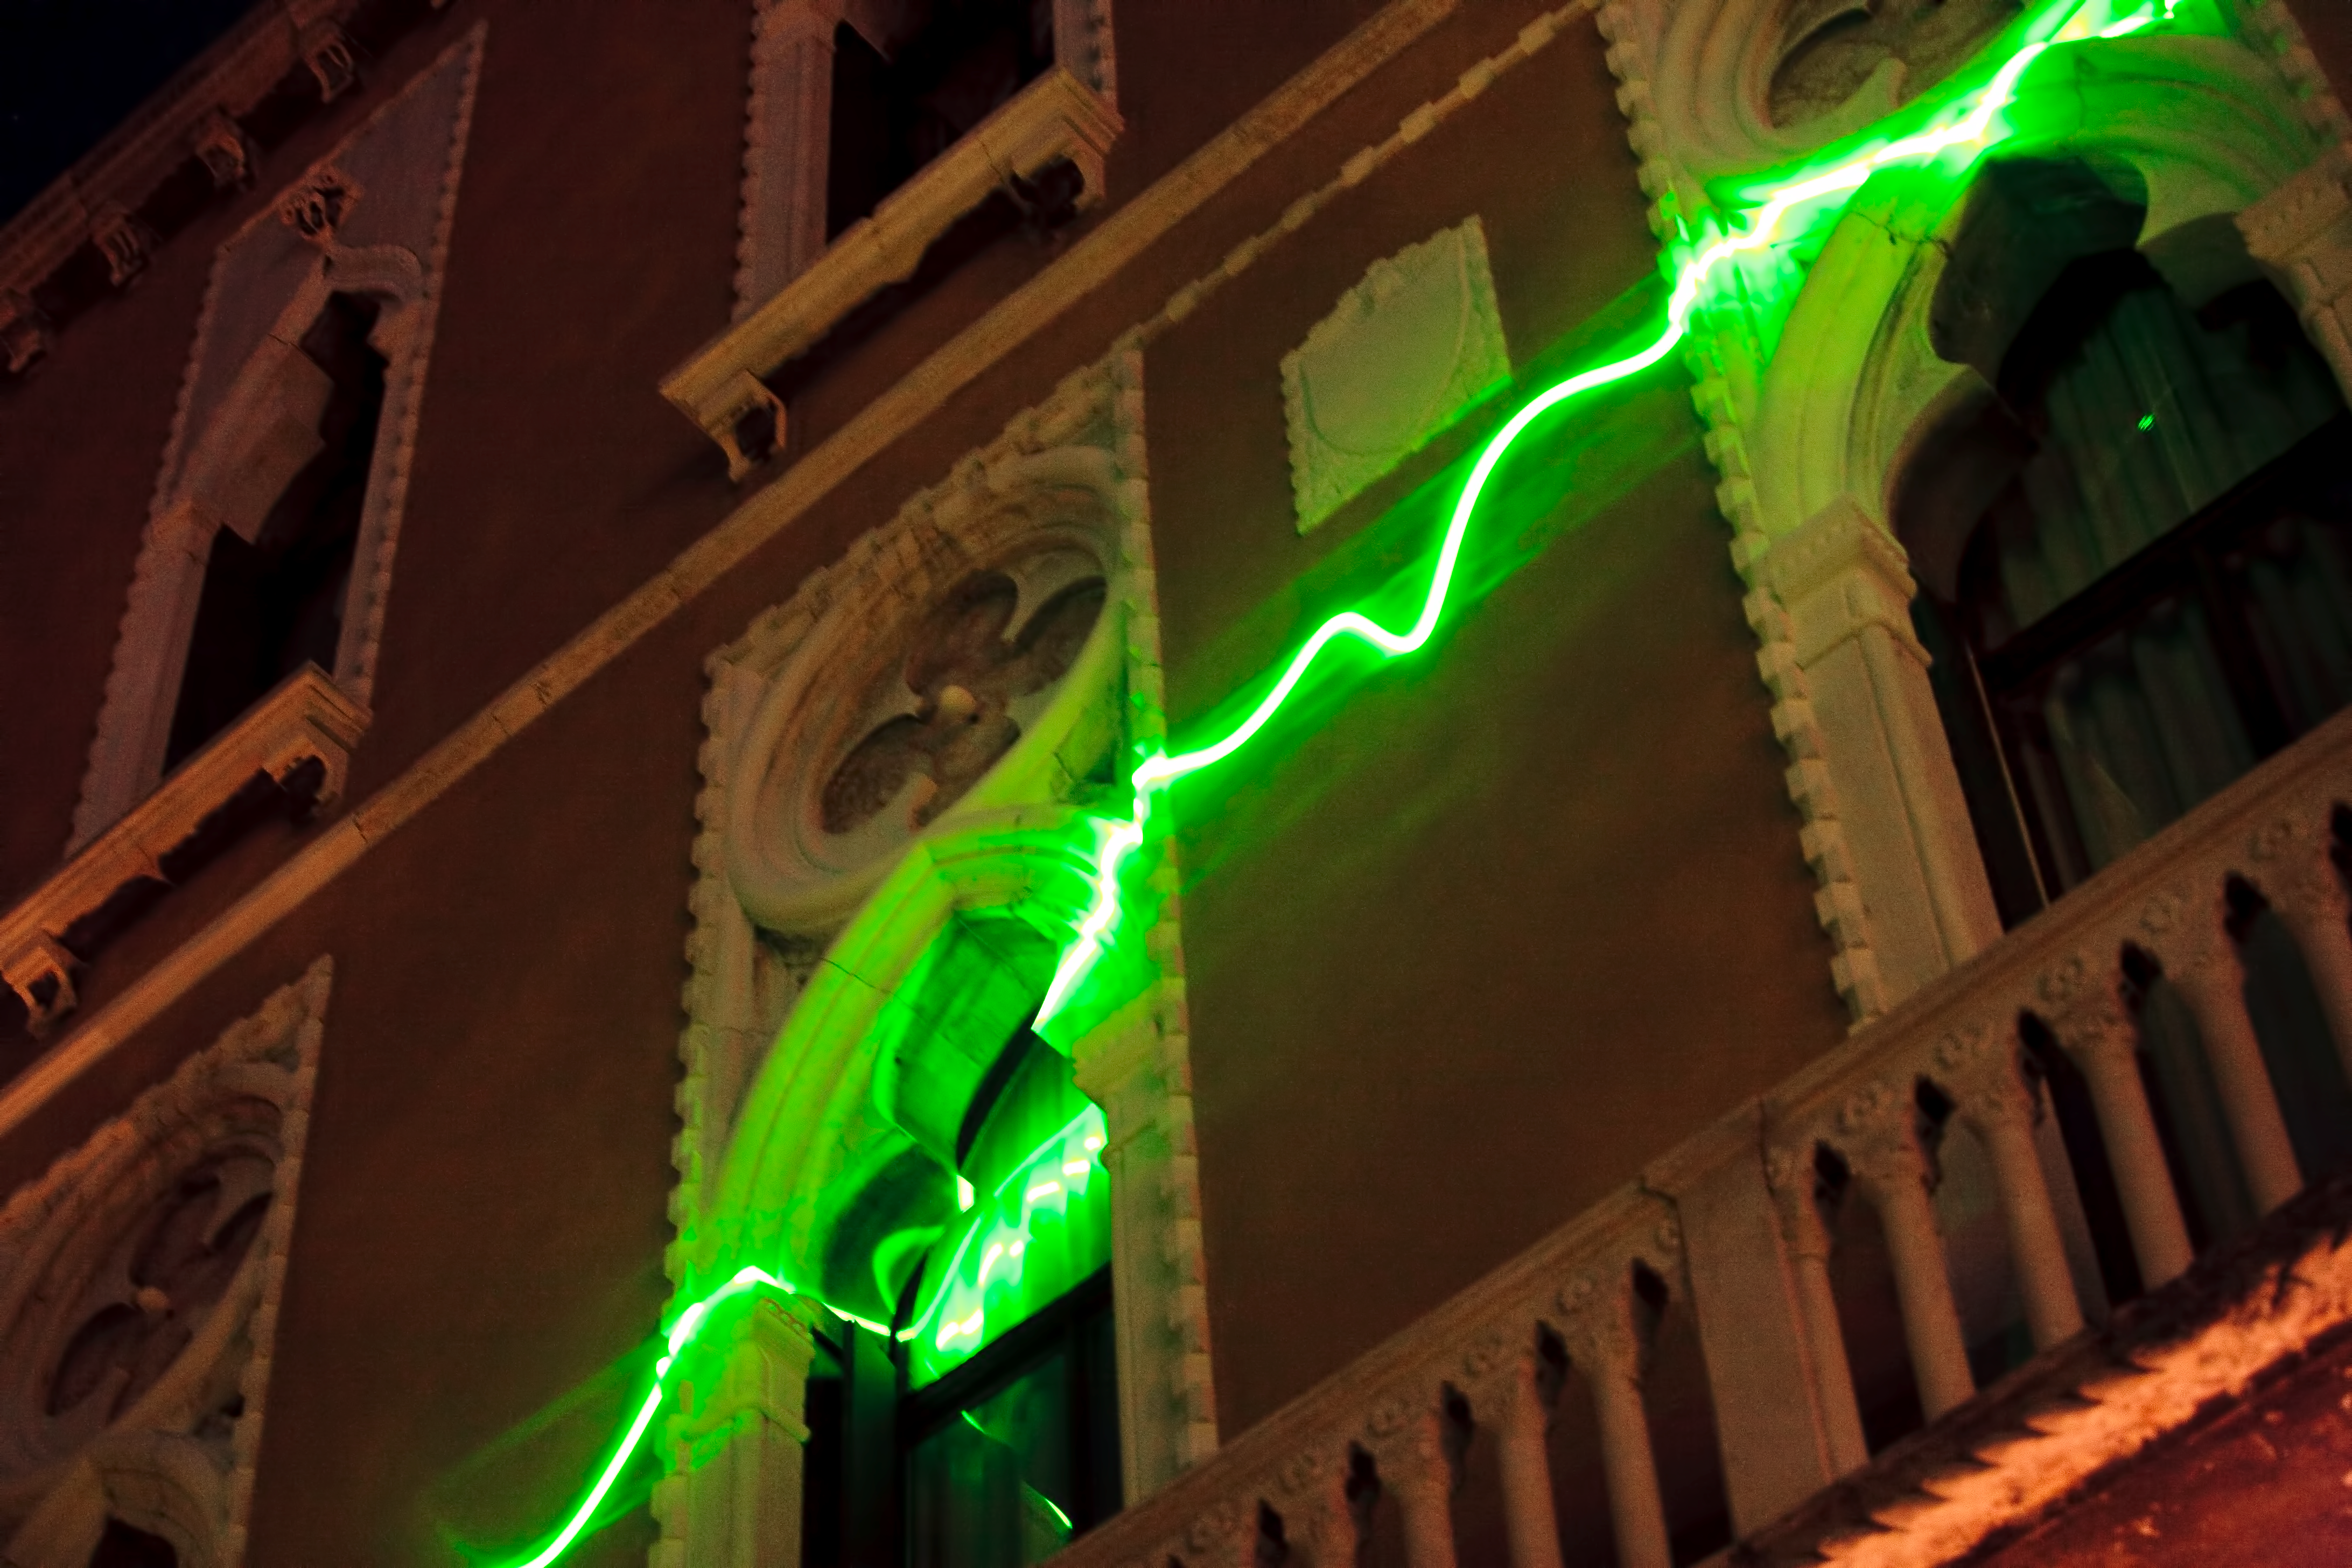

From the distant past

From the Distant Past, a laser art installation by German artist Tim Otto Roth. A green scanning laser projects spectra from distant galaxies onto the wall of the Palazzo Cavalli-Franchetti in Venice, during the Science with the Hubble Space Telescope III conference in Venice, Italy, in October 2010.

Credit: NASA & ESA